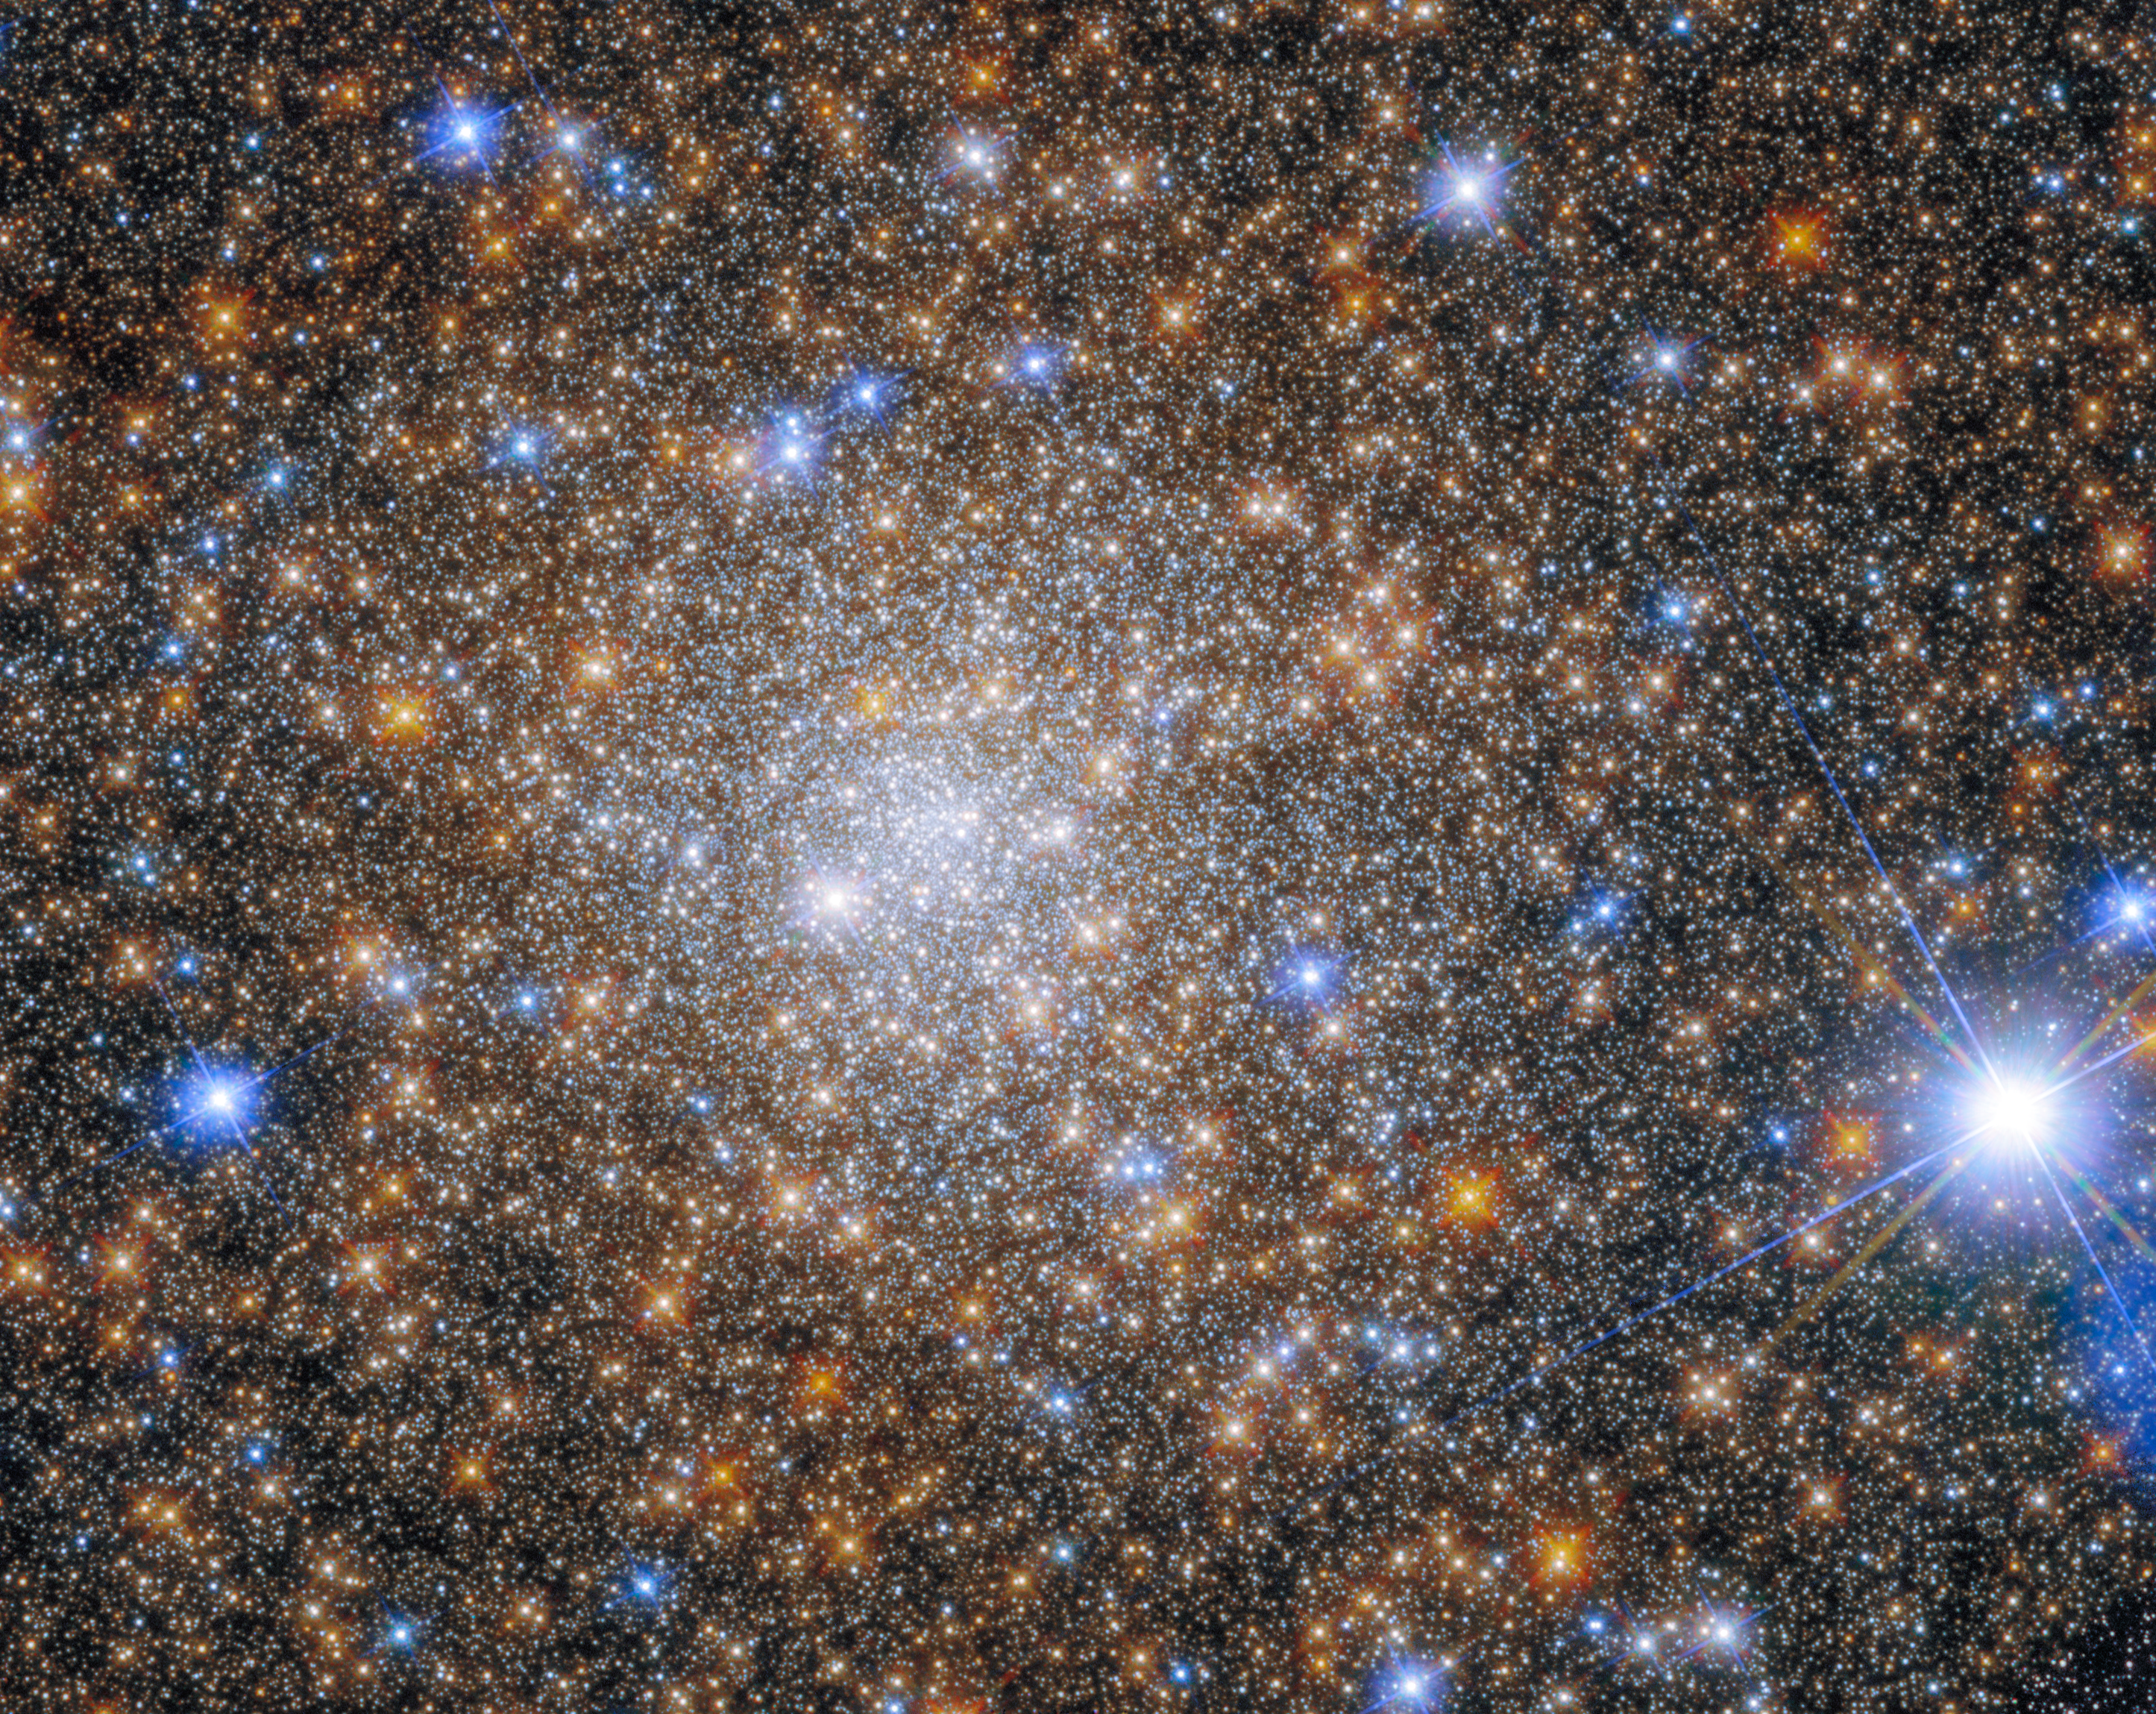

Terzan 1, Take 2

Terzan 1 is a globular cluster that lies about 22,000 light-years from Earth in the constellation Scorpius. It is one of 11 globular clusters that were discovered by the Turkish-Armenian astronomer Agop Terzan between 1966 and 1971 when he was working in France, based mostly at Lyon Observatory.

Somewhat confusingly, the 11 Terzan globular clusters are numbered from Terzan 1 to Terzan 12. This is due to an error made by Terzan in 1971, when he rediscovered Terzan 5 — a cluster he had already discovered and reported back in 1968 — and named it Terzan 11. He published its discovery alongside those of Terzan 9, 10 and 12. He quickly realised his mistake, and attempted to have Terzan 12 renamed as Terzan 11. Unfortunately, he did not make it clear that Terzan 5 and Terzan 11 were one and the same, although another astronomer, Ivan Robert King, did publish a note to try and clear up the confusion. Nowadays, most papers recognise the original Terzan 5 and Terzan 12, and accept the oddity that there is no Terzan 11. There have, however, been instances of confusion in the scientific literature over the past few decades.

Terzan 1 is not a new target for Hubble — an image of the cluster was released back in 2015, taken by Hubble’s Wide Field Planetary Camera 2 (WFPC2). That instrument was replaced by the Wide Field Camera 3 (WFC3) during the 2009 Hubble servicing mission. WFC3 has both superior resolving power and a wider field of view than WFPC2, and the improvement is obvious in this fantastically detailed image.

Credit: ESA/Hubble & NASA, R. Cohen